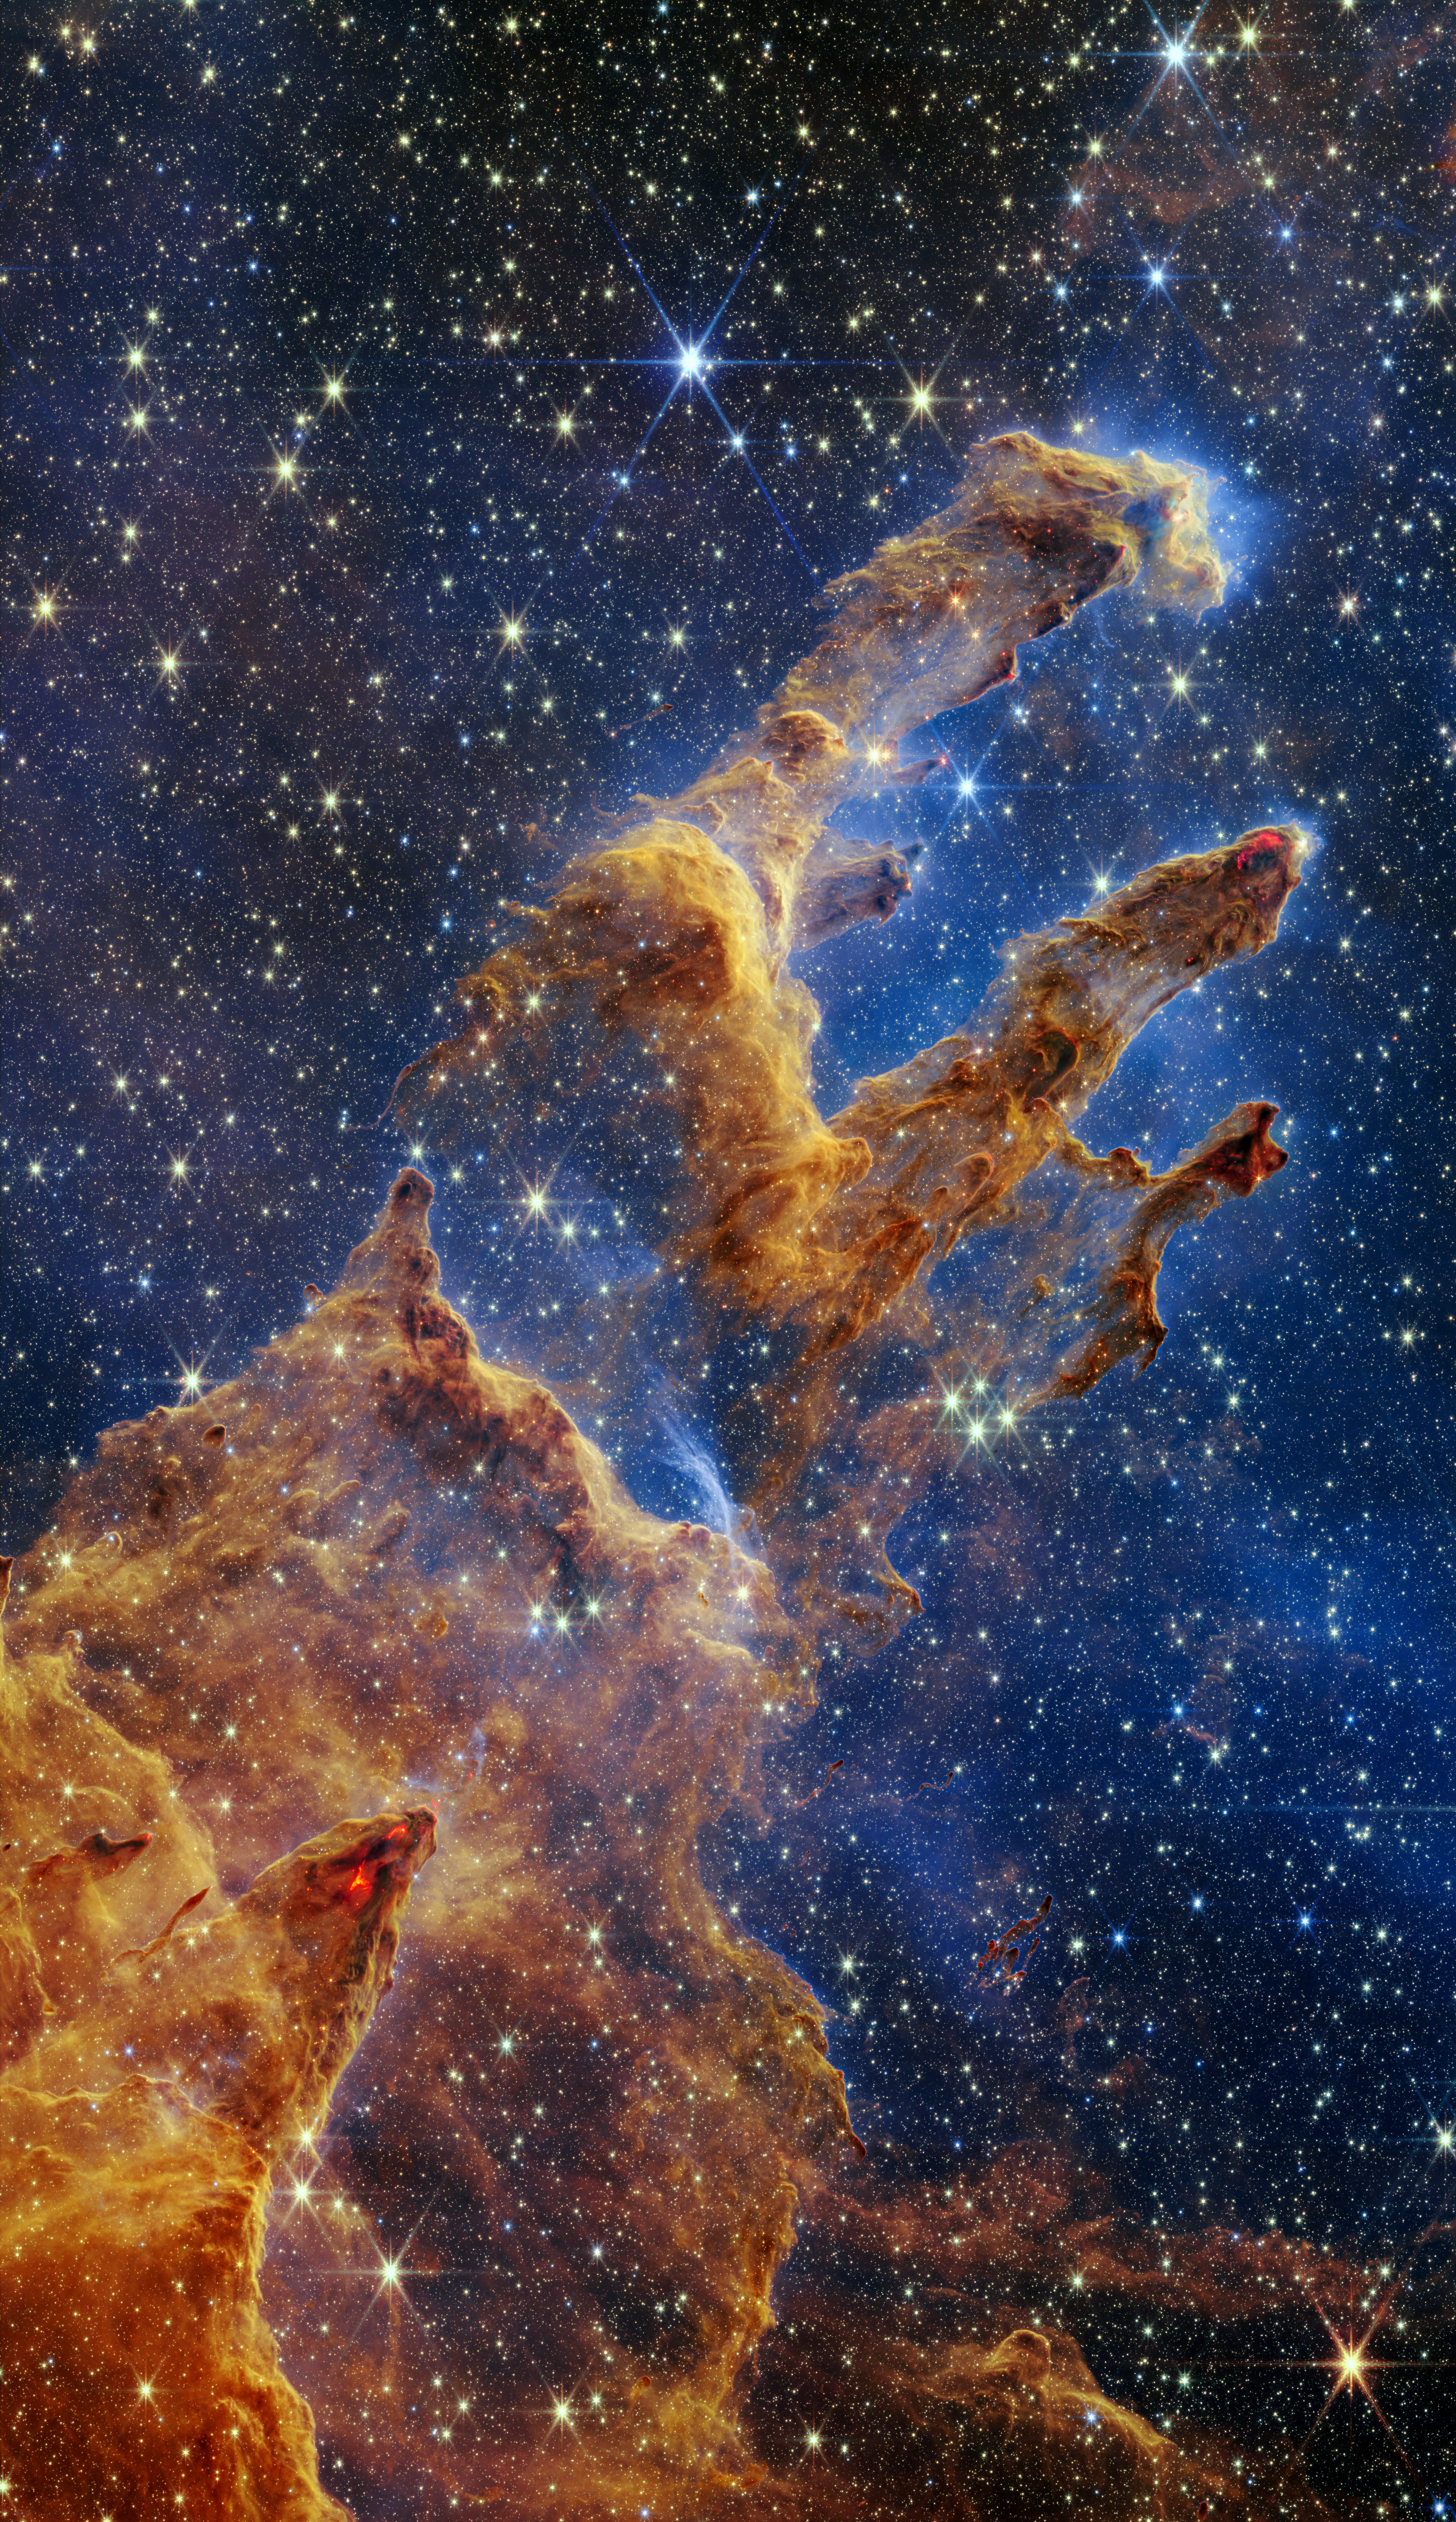

Webb Takes a Stunning, Star-Filled Portrait of the Pillars of Creation (Full View)

The Pillars of Creation are set off in a kaleidoscope of colour in the NASA/ESA/CSA James Webb Space Telescope’s near-infrared-light view. The pillars look like arches and spires rising out of a desert landscape, but are filled with semi-transparent gas and dust, and ever changing. This is a region where young stars are forming – or have barely burst from their dusty cocoons as they continue to form.

Protostars are the scene-stealers in this Near-Infrared Camera (NIRCam) image. These are the bright red orbs that sometimes appear with eight diffraction spikes. When knots with sufficient mass form within the pillars, they begin to collapse under their own gravity, slowly heat up, and eventually begin shining brightly.

Along the edges of the pillars are wavy lines that look like lava. These are ejections from stars that are still forming. Young stars periodically shoot out jets that can interact within clouds of material, like these thick pillars of gas and dust. This sometimes also results in bow shocks, which can form wavy patterns like a boat does as it moves through water. These young stars are estimated to be only a few hundred thousand years old, and will continue to form for millions of years.

Although it may appear that near-infrared light has allowed Webb to “pierce through” the background to reveal great cosmic distances beyond the pillars, the interstellar medium stands in the way, like a drawn curtain.

This is also the reason why there are no distant galaxies in this view. This translucent layer of gas blocks our view of the deeper universe. Plus, dust is lit up by the collective light from the packed “party” of stars that have burst free from the pillars. It’s like standing in a well-lit room looking out a window – the interior light reflects on the pane, obscuring the scene outside and, in turn, illuminating the activity at the party inside.

Webb’s new view of the Pillars of Creation will help researchers revamp models of star formation. By identifying far more precise star populations, along with the quantities of gas and dust in the region, they will begin to build a clearer understanding of how stars form and burst out of these clouds over millions of years.

The Pillars of Creation is a small region within the vast Eagle Nebula, which lies 6,500 light-years away.

Webb’s NIRCam was built by a team at the University of Arizona and Lockheed Martin’s Advanced Technology Center.

Credit: NASA, ESA, CSA, STScI; J. DePasquale, A. Koekemoer, A. Pagan (STScI).